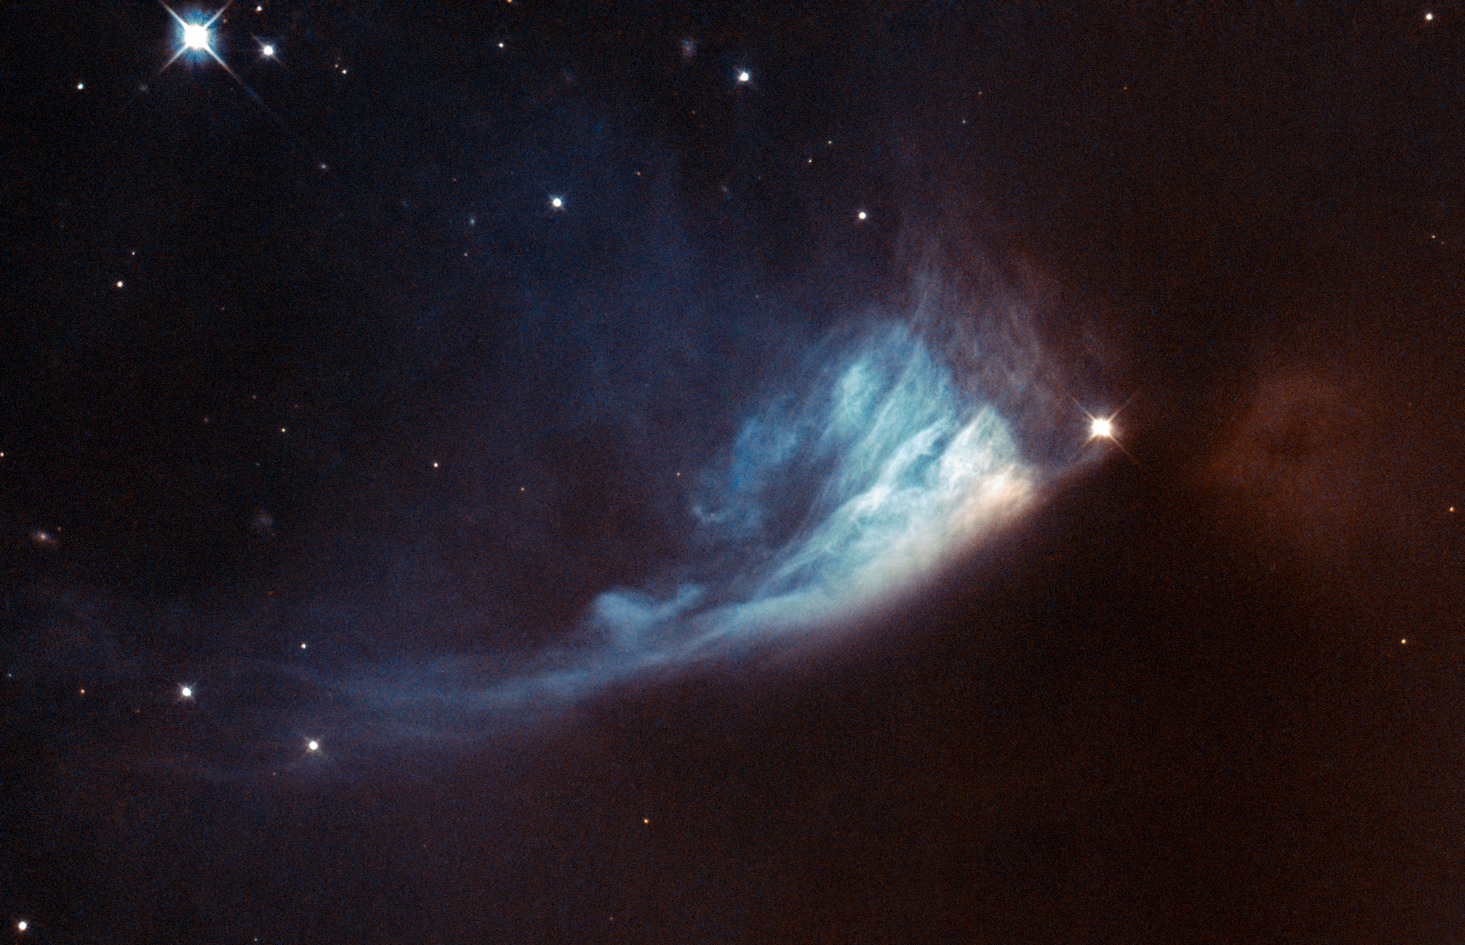

A changing fan

The Universe is rarely static, although the timescales involved can be very long. Since modern astronomical observations began we have been observing the birthplaces of new stars and planets, searching for and studying the subtle changes that help us to figure out what is happening within.

The bright spot located at the edge of the bluish fan-shaped structure in this Hubble image is a young star called V* PV Cephei, or PV Cep. It is a favourite target for amateur astronomers because the fan-shaped nebulosity, known as GM 1-29 or Gyulbudaghian’s Nebula, changes over a timescale of months. The brightness of the star has also varied over time.

Images of PV Cep taken in 1952 showed a nebulous streak, similar to a comet’s tail. However, these had vanished when new images of the star were obtained some twenty-five years later. Instead, the blue fan-shaped nebula had appeared. Twenty-five years is a very short period on cosmic timescales, so astronomers think that the mysterious streak may have been a temporary phenomenon, such as the remnants of a massive stellar flare — similar to the solar flares we are used to seeing in the Solar System.

At the same time as this was happening, the star itself was brightening. This provided the light to illuminate the newly formed fan-shaped nebula. This brightening might be related to the start of the hydrogen-burning phase of the star, which would mean that it was reaching maturity.

PV Cep is thought to be surrounded by a disc of gas and dust, which would stop light from escaping in all directions. The fan-like appearance is therefore probably a result of starlight escaping from the dust disc and projecting onto the nebula.

PV Cep is located in the northern constellation of Cepheus at a distance of over 1600 light-years from Earth.

A version of this image was entered into the Hubble’s Hidden Treasures competition by contestant Alexey Romashin.

Credit: ESA/Hubble & NASA. Acknowledgement: Alexey Romashin